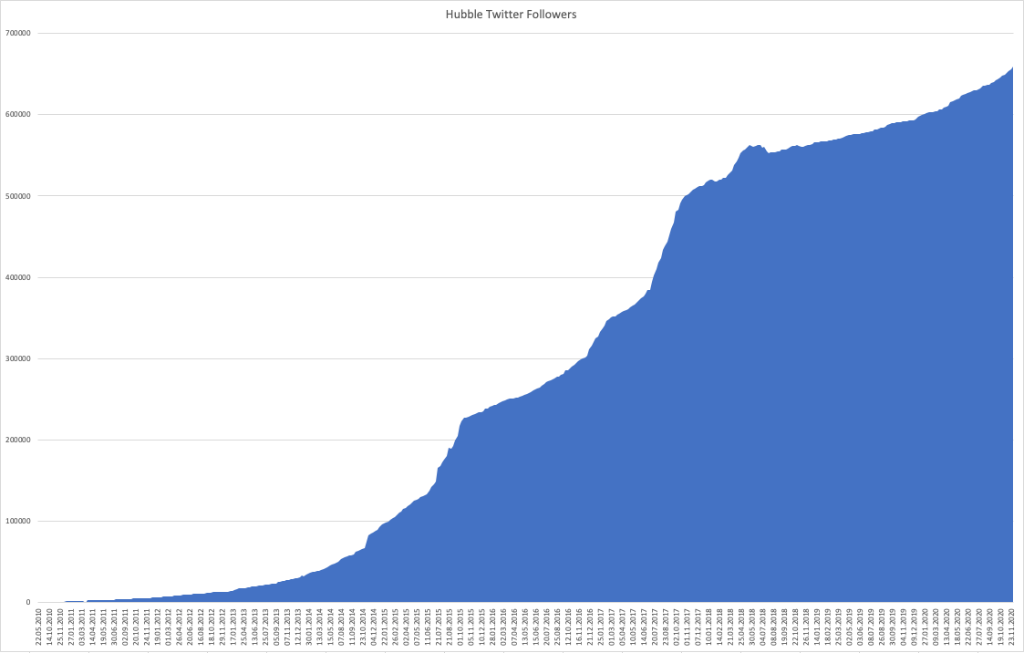

ESA/Hubble Twitter number of followers over time

ESA/Hubble Twitter number of followers over time.

Credit: ESA/Hubble